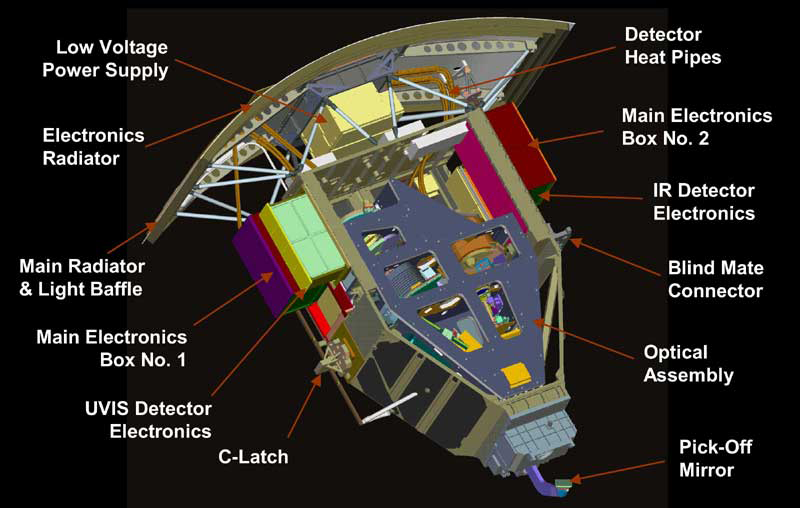

Components of the Wide Field Camera 3

This drawing shows the main components of Hubble's Wide Field Camera 3 (WFC3). The camera was installed during the last Servicing Mission in 2009 and replaced the older Wide Field Planetary Camera 2.

Credit: NASA & ESA